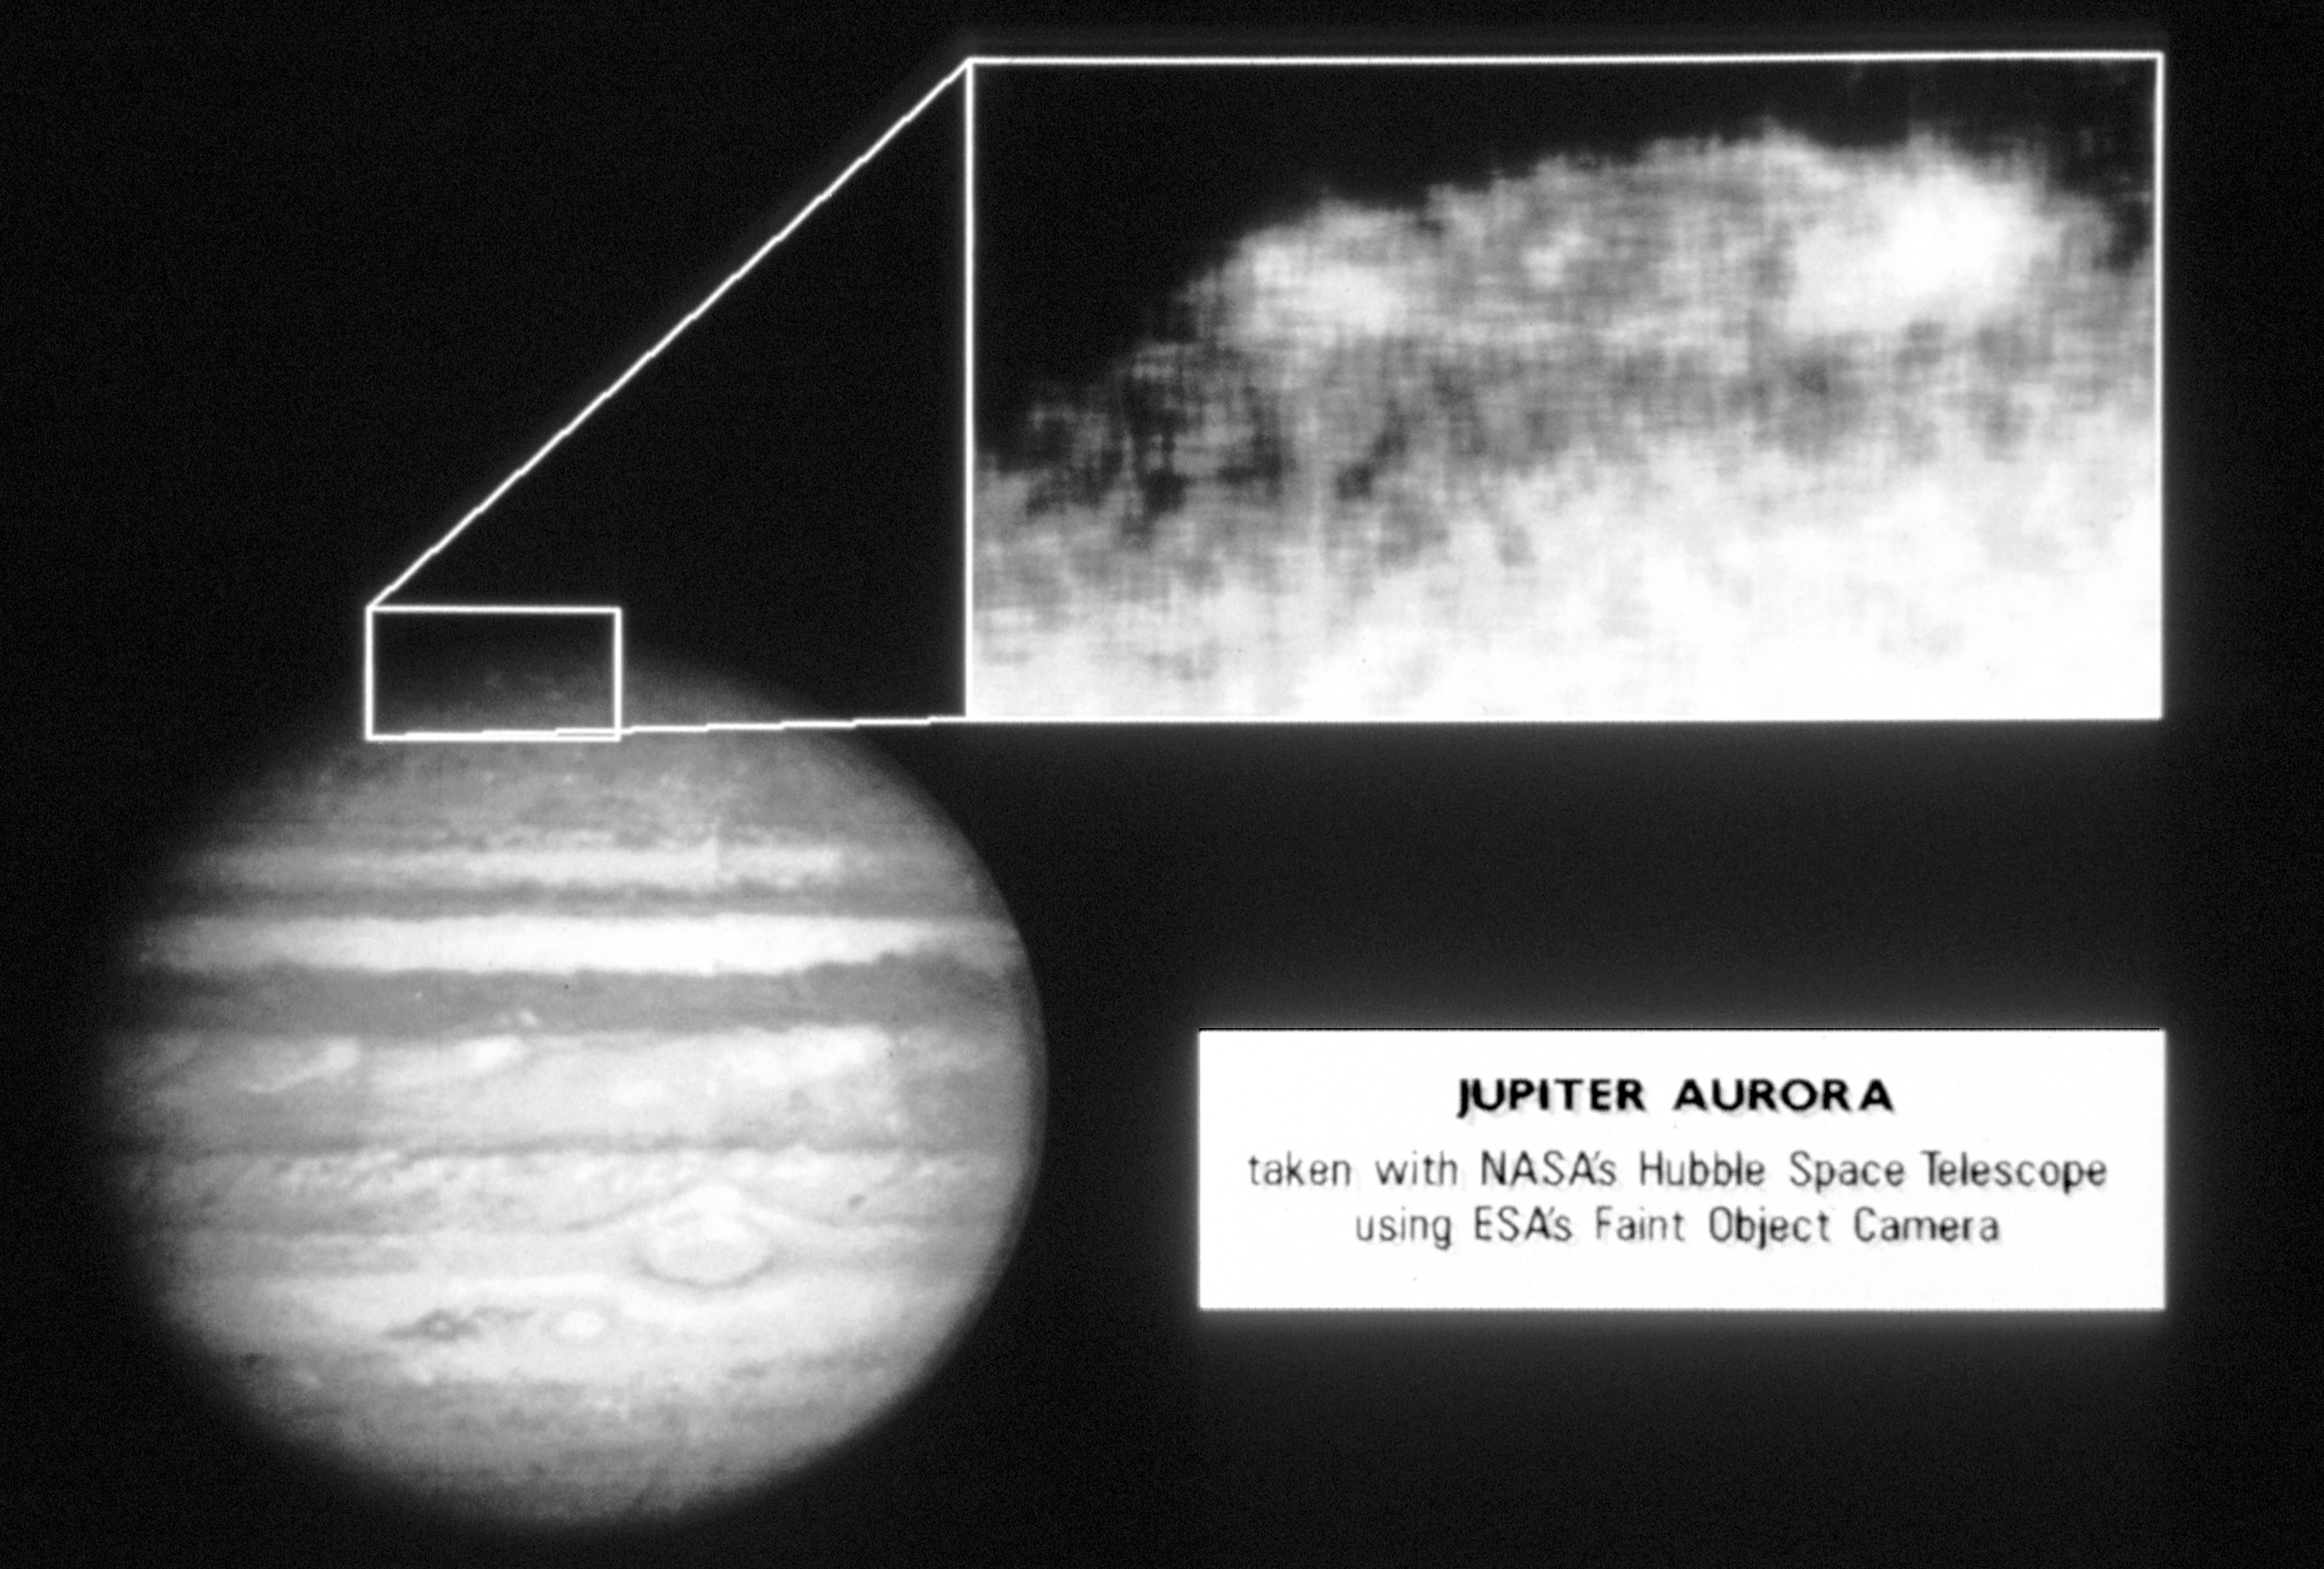

NASA Hubble Space Telescope photographs Jupiter aurora

The image at top right shows Jovian aurora observed on February 8, 1992, by the European Space Agency's Faint Object Camera(FOC) aboard NASA/ESA Hubble Space Telescope (HST). This is the first direct image of the aurora taken in ultraviolet light (1600Angstroms) and the best auroral images ever. An earlier image of Jupiter's full disk (lower left), obtained by HST's WideField/Planetary Camera, shows the location of the northern aurora (box) with respect to the rest of the planet.

The FOC image shows the aurora is not uniformly bright, but rather there is a region of significantly increased brightness toward the west (right) side. This effect has not yet been explained fully.

Credit: John Caldwell, Institute for Space and Terrestrial Science, and York University; and NASA/ESA